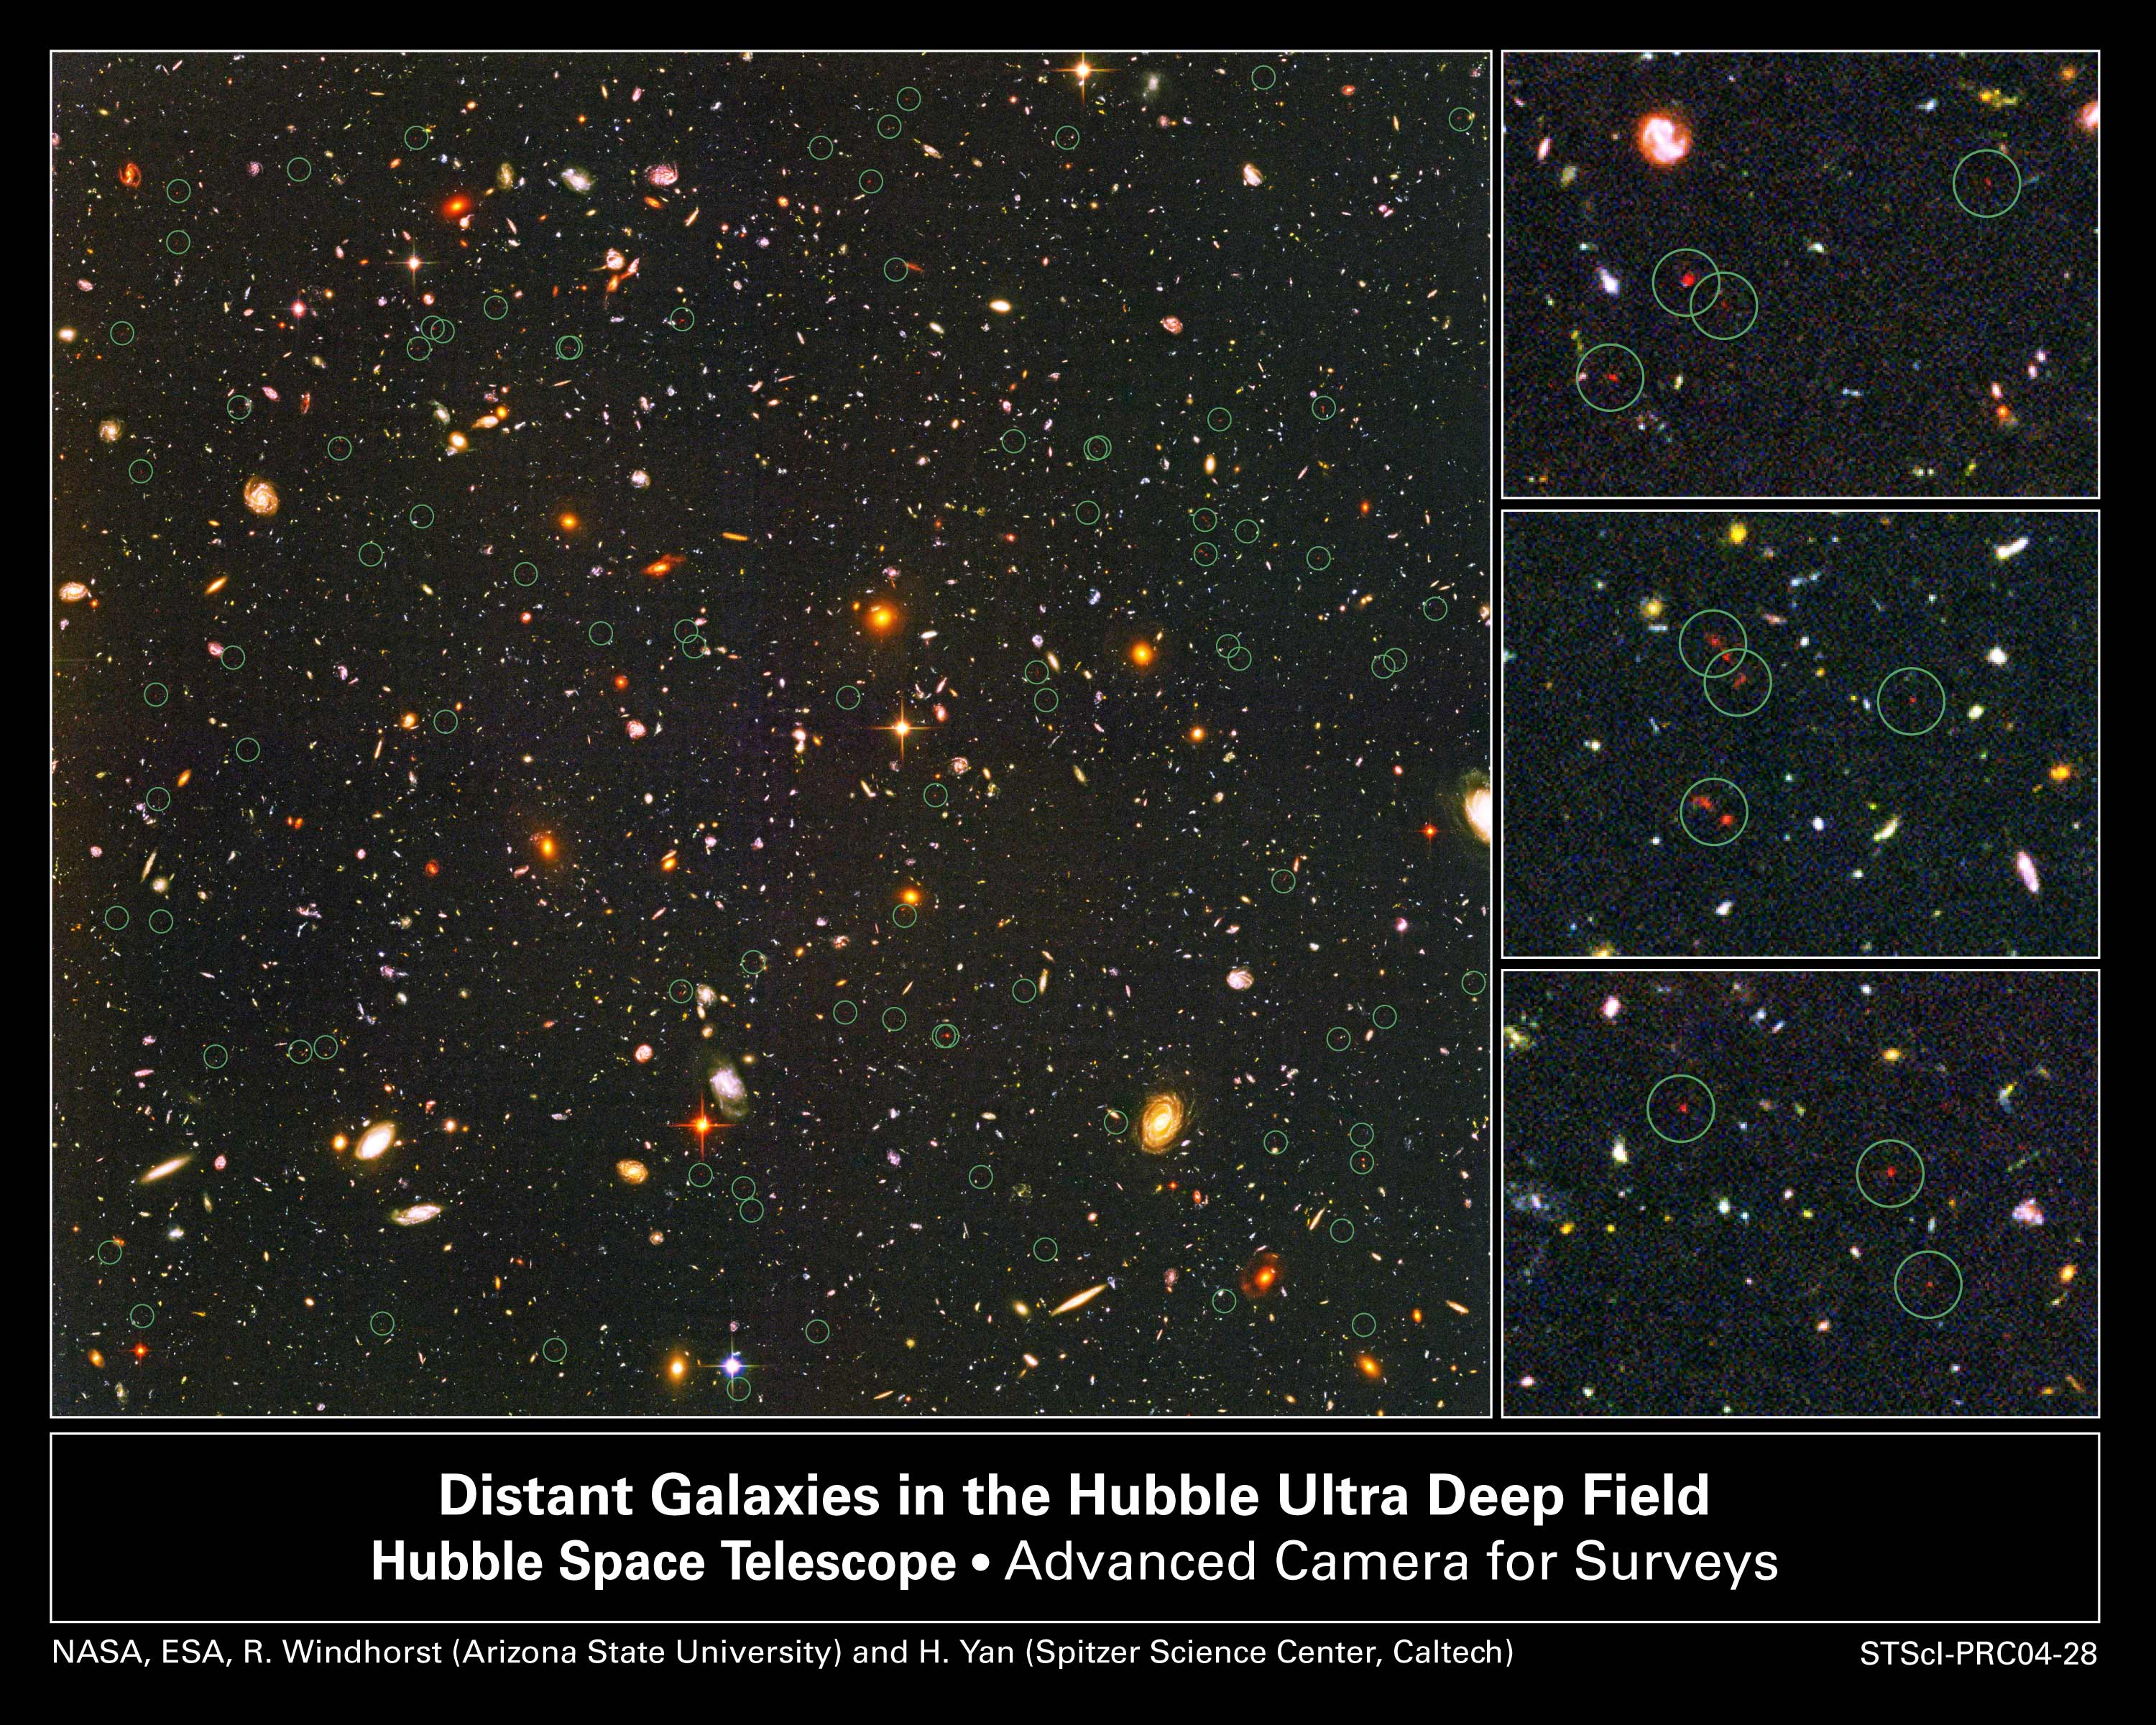

Farthest Objects Ever Seen Pinpointed in the Hubble Ultra Deep Field

Detailed analyses of mankind's deepest optical view of the universe, the Hubble Ultra Deep Field (HUDF), by several expert teams have at last identified what may turn out to be some of the earliest star-forming galaxies. The sensitivity of Hubble's Advanced Camera for Surveys (ACS), combined with the penetrating power of the Near Infrared Camera and Multi-Object Spectrometer (NICMOS), finally revealed these long-sought faint galaxies. The HUDF shows that close to a billion years after the big bang the early universe was filled with dwarf galaxies, but no fully formed galaxies like our Milky Way. After careful analysis, they have been sorted out as between 54 and 108 dim, red smudges sprinkled across the HUDF image. This image shows the full sample of candidates circled in green. Three enlargements at right show several dwarf objects that are at the limits of Hubble's present instrument capabilities. The HUDF is a small region of sky in the direction of the southern constellation Fornax. The faintest objects are less than one four-billionth the brightness of stars that can be seen with the naked eye. Their light has taken nearly 13 billion years to reach Earth, and so these objects represent some of the earliest star-forming galaxies to form in the universe.

Credit: NASA, ESA, R. Windhorst (Arizona State University) and H. Yan (Spitzer Science Center, Caltech)